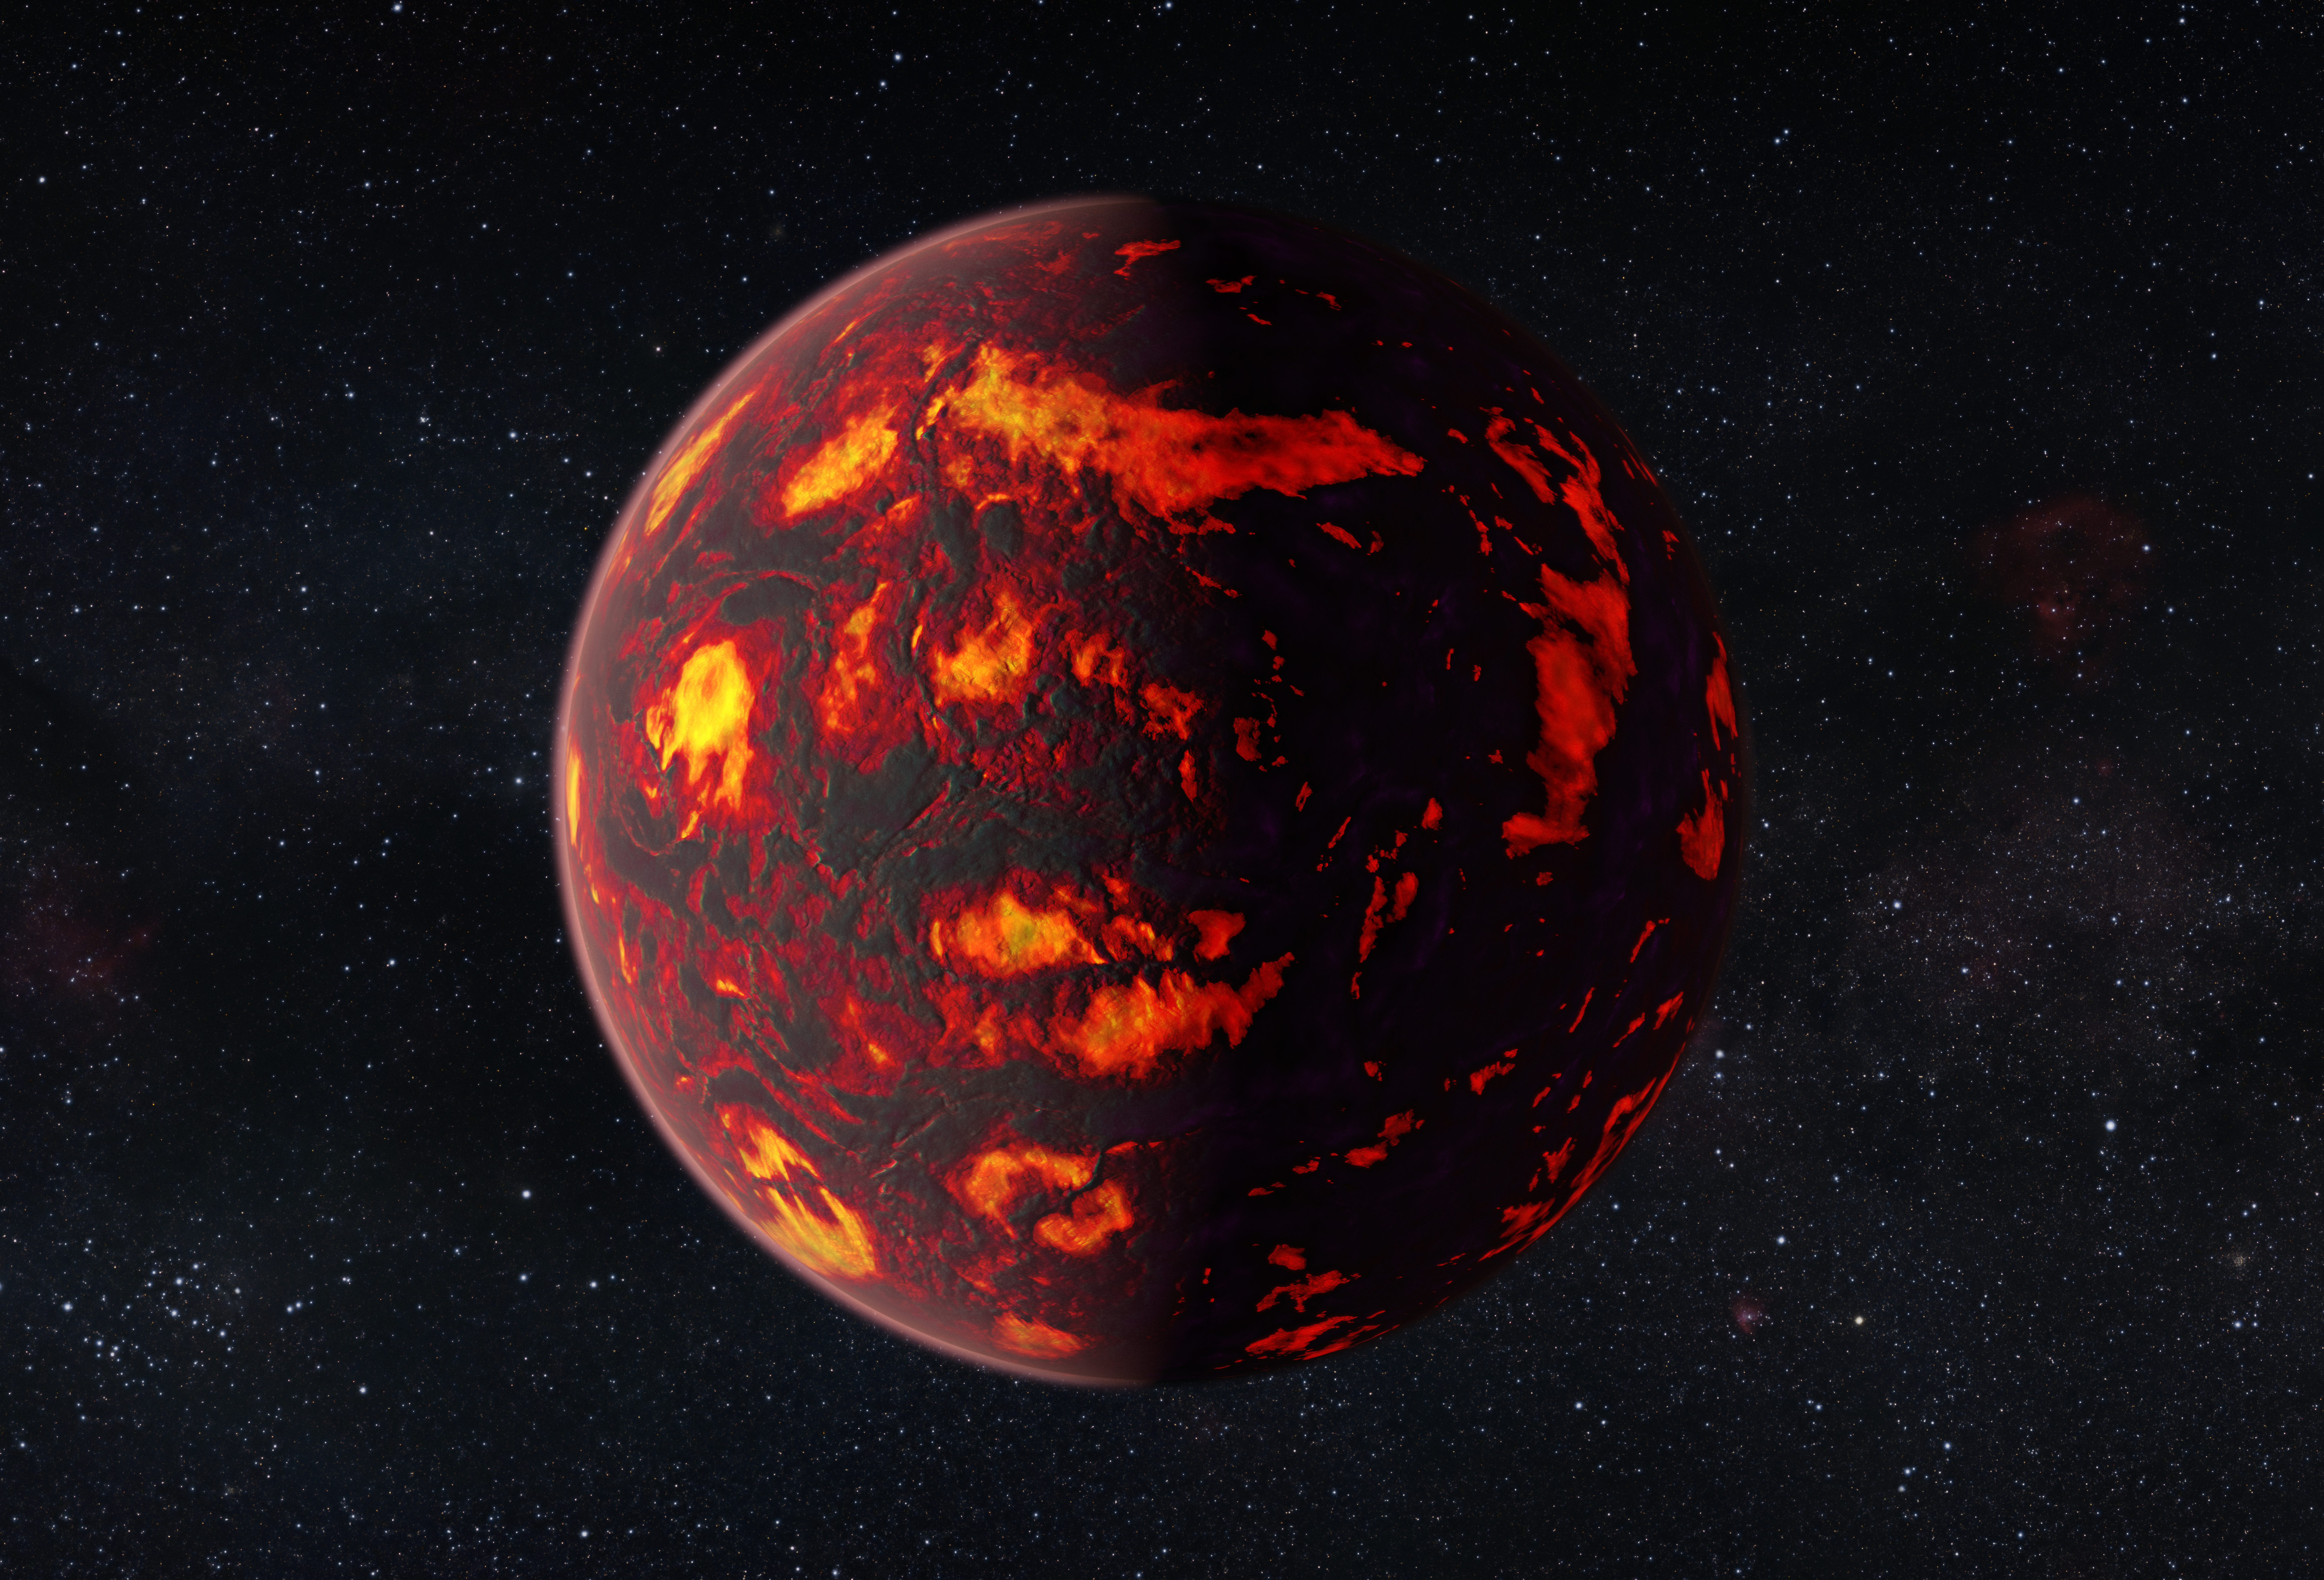

Artist’s impression of 55 Cancri e (close-up)

This artist’s impression shows the exoplanet 55 Cancri e as close-up. Due to its proximity to its parent star, the temperatures on the surface of the planet are thought to reach about 2000 degrees Celsius.

Scientists were able to analyze the atmosphere of 55 Cancri e. It was the first time this was possible for a super-Earth exoplanet.

Credit: ESA/Hubble, M. Kornmesser